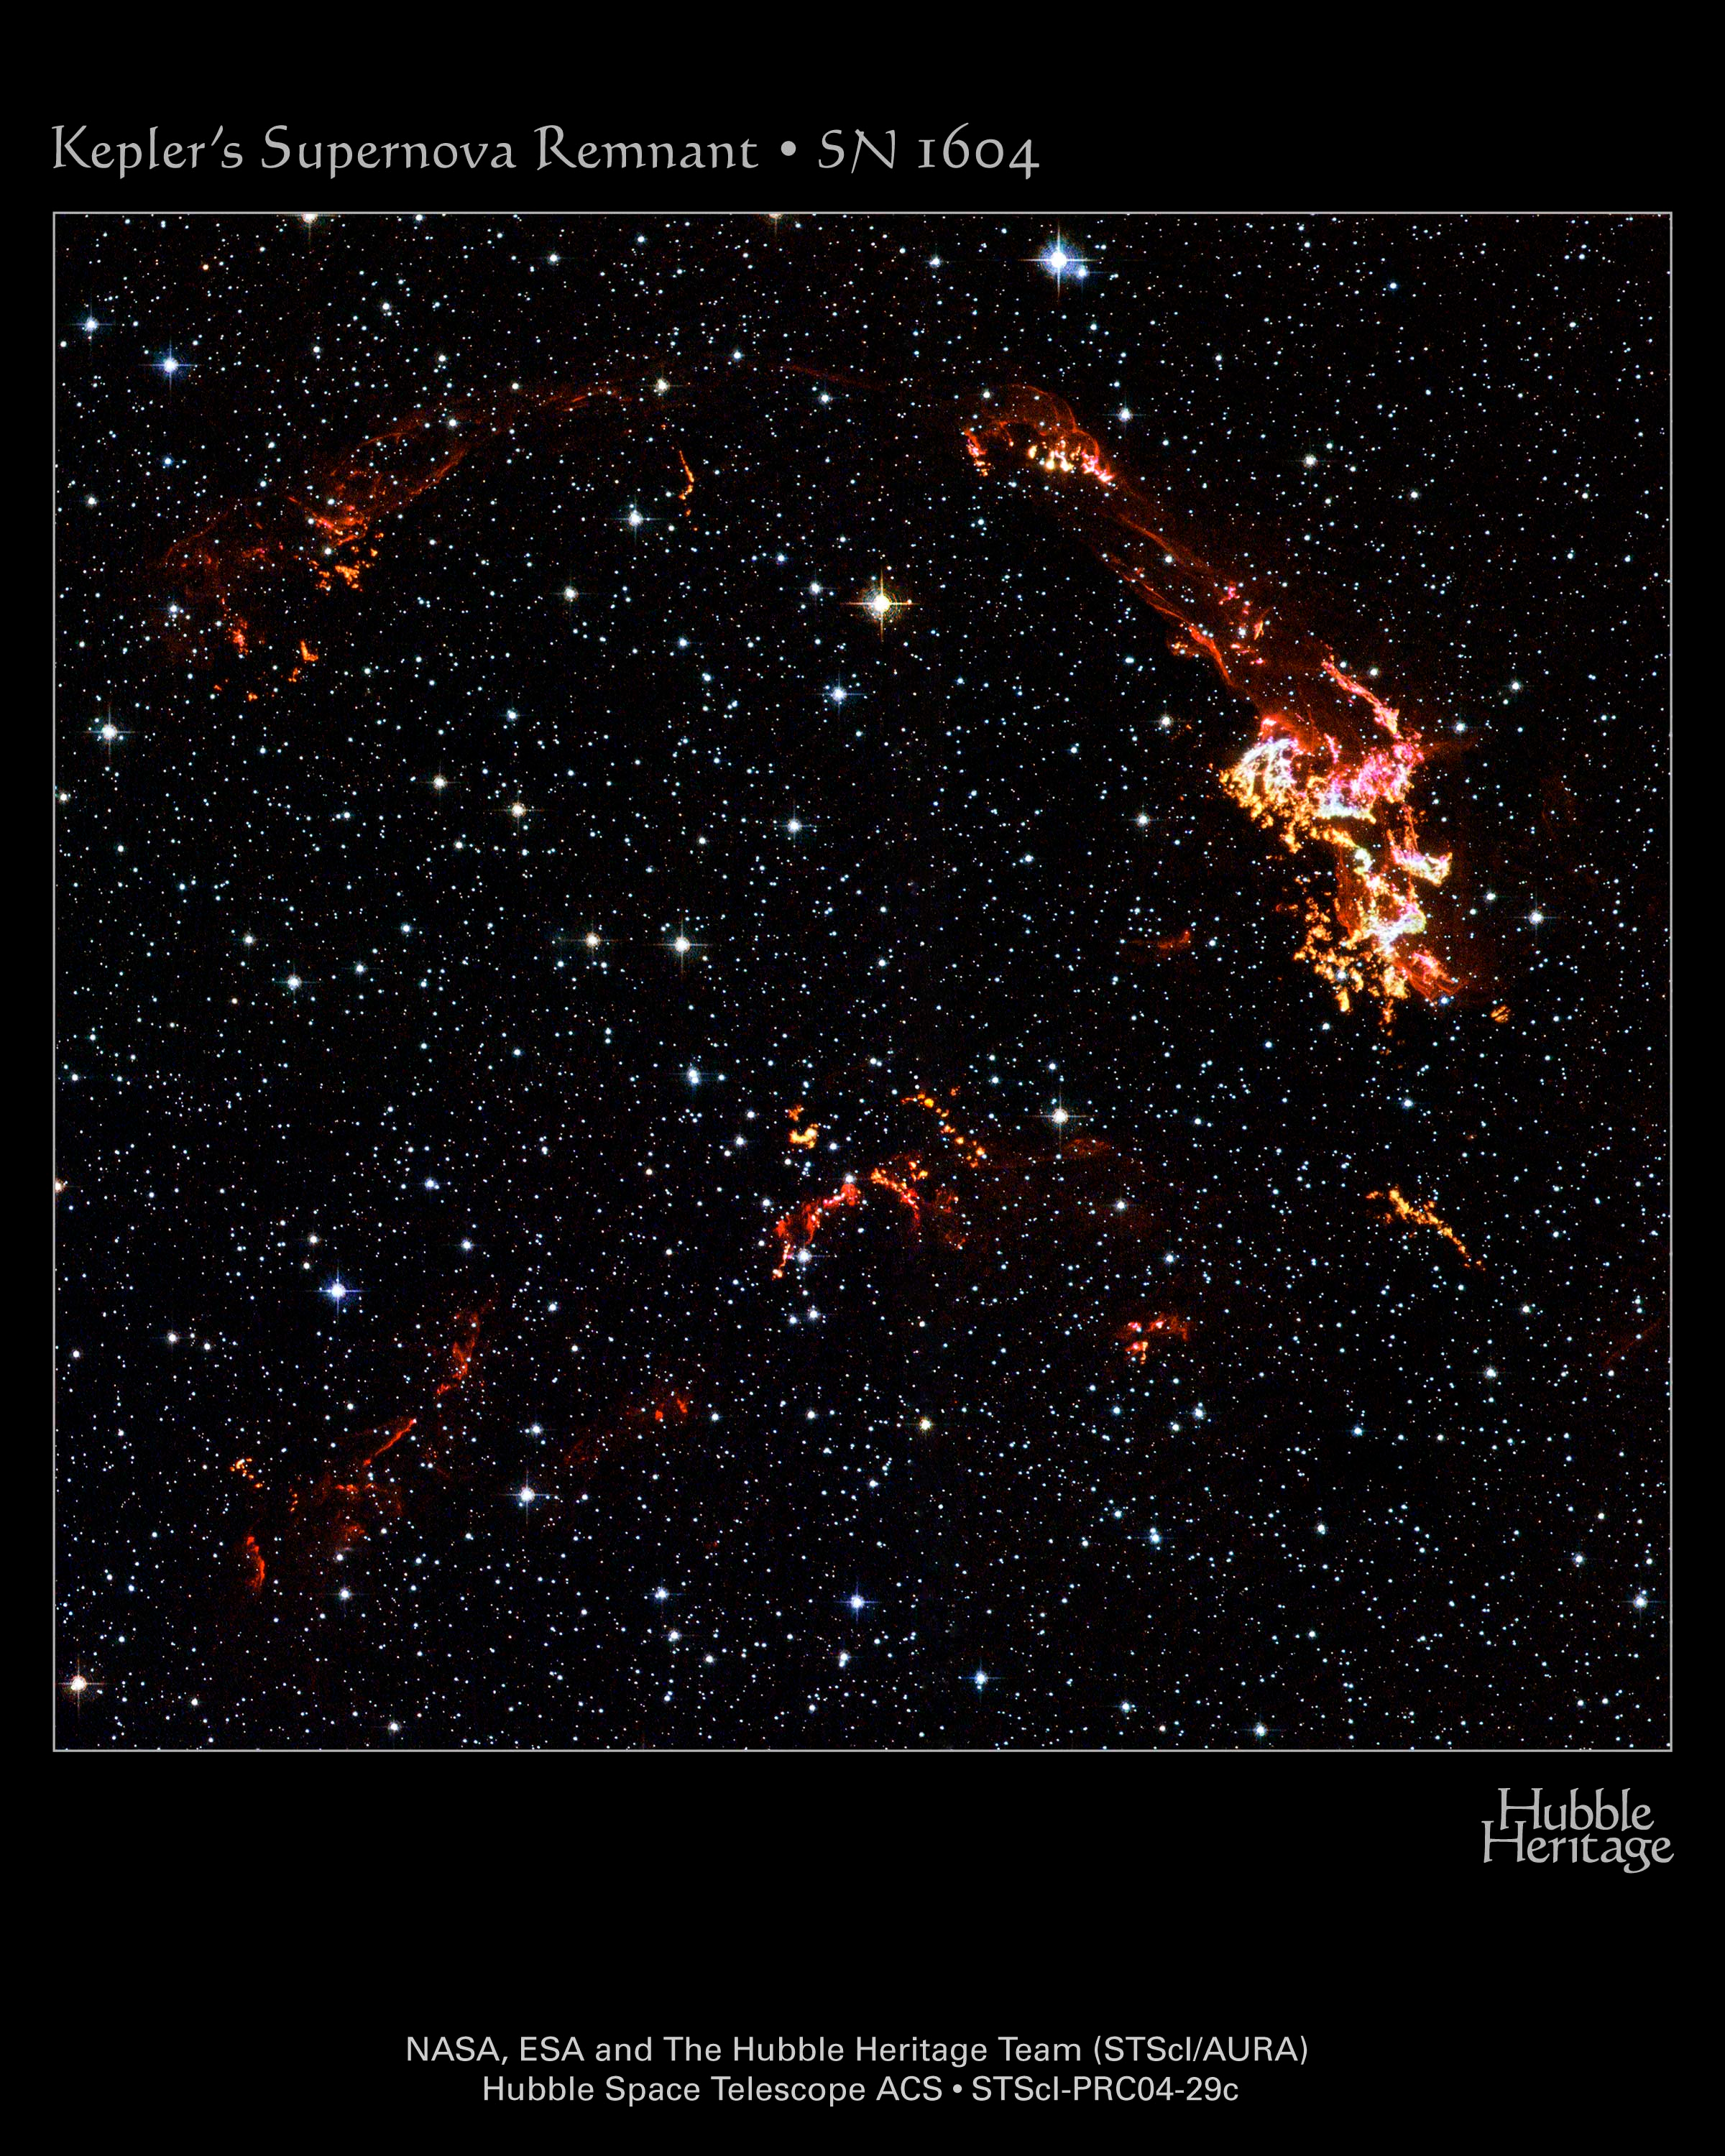

Hubble images Kepler's Supernova remnant (Hubble heritage photo)

12:02:28Detailed knots and filamentary ribbons of glowing gas are apparent in this Hubble Space Telescope image of Kepler's supernova remnant. This image was taken with Hubble's Advanced Camera for Surveys (ACS) in August 2003. Filters onboard Hubble isolate visible light emitted by hydrogen, nitrogen, and oxygen in the remnant and also let through starlight from foreground and background stars.

Credit: NASA, ESA, The Hubble Heritage Team STScI/AURA)